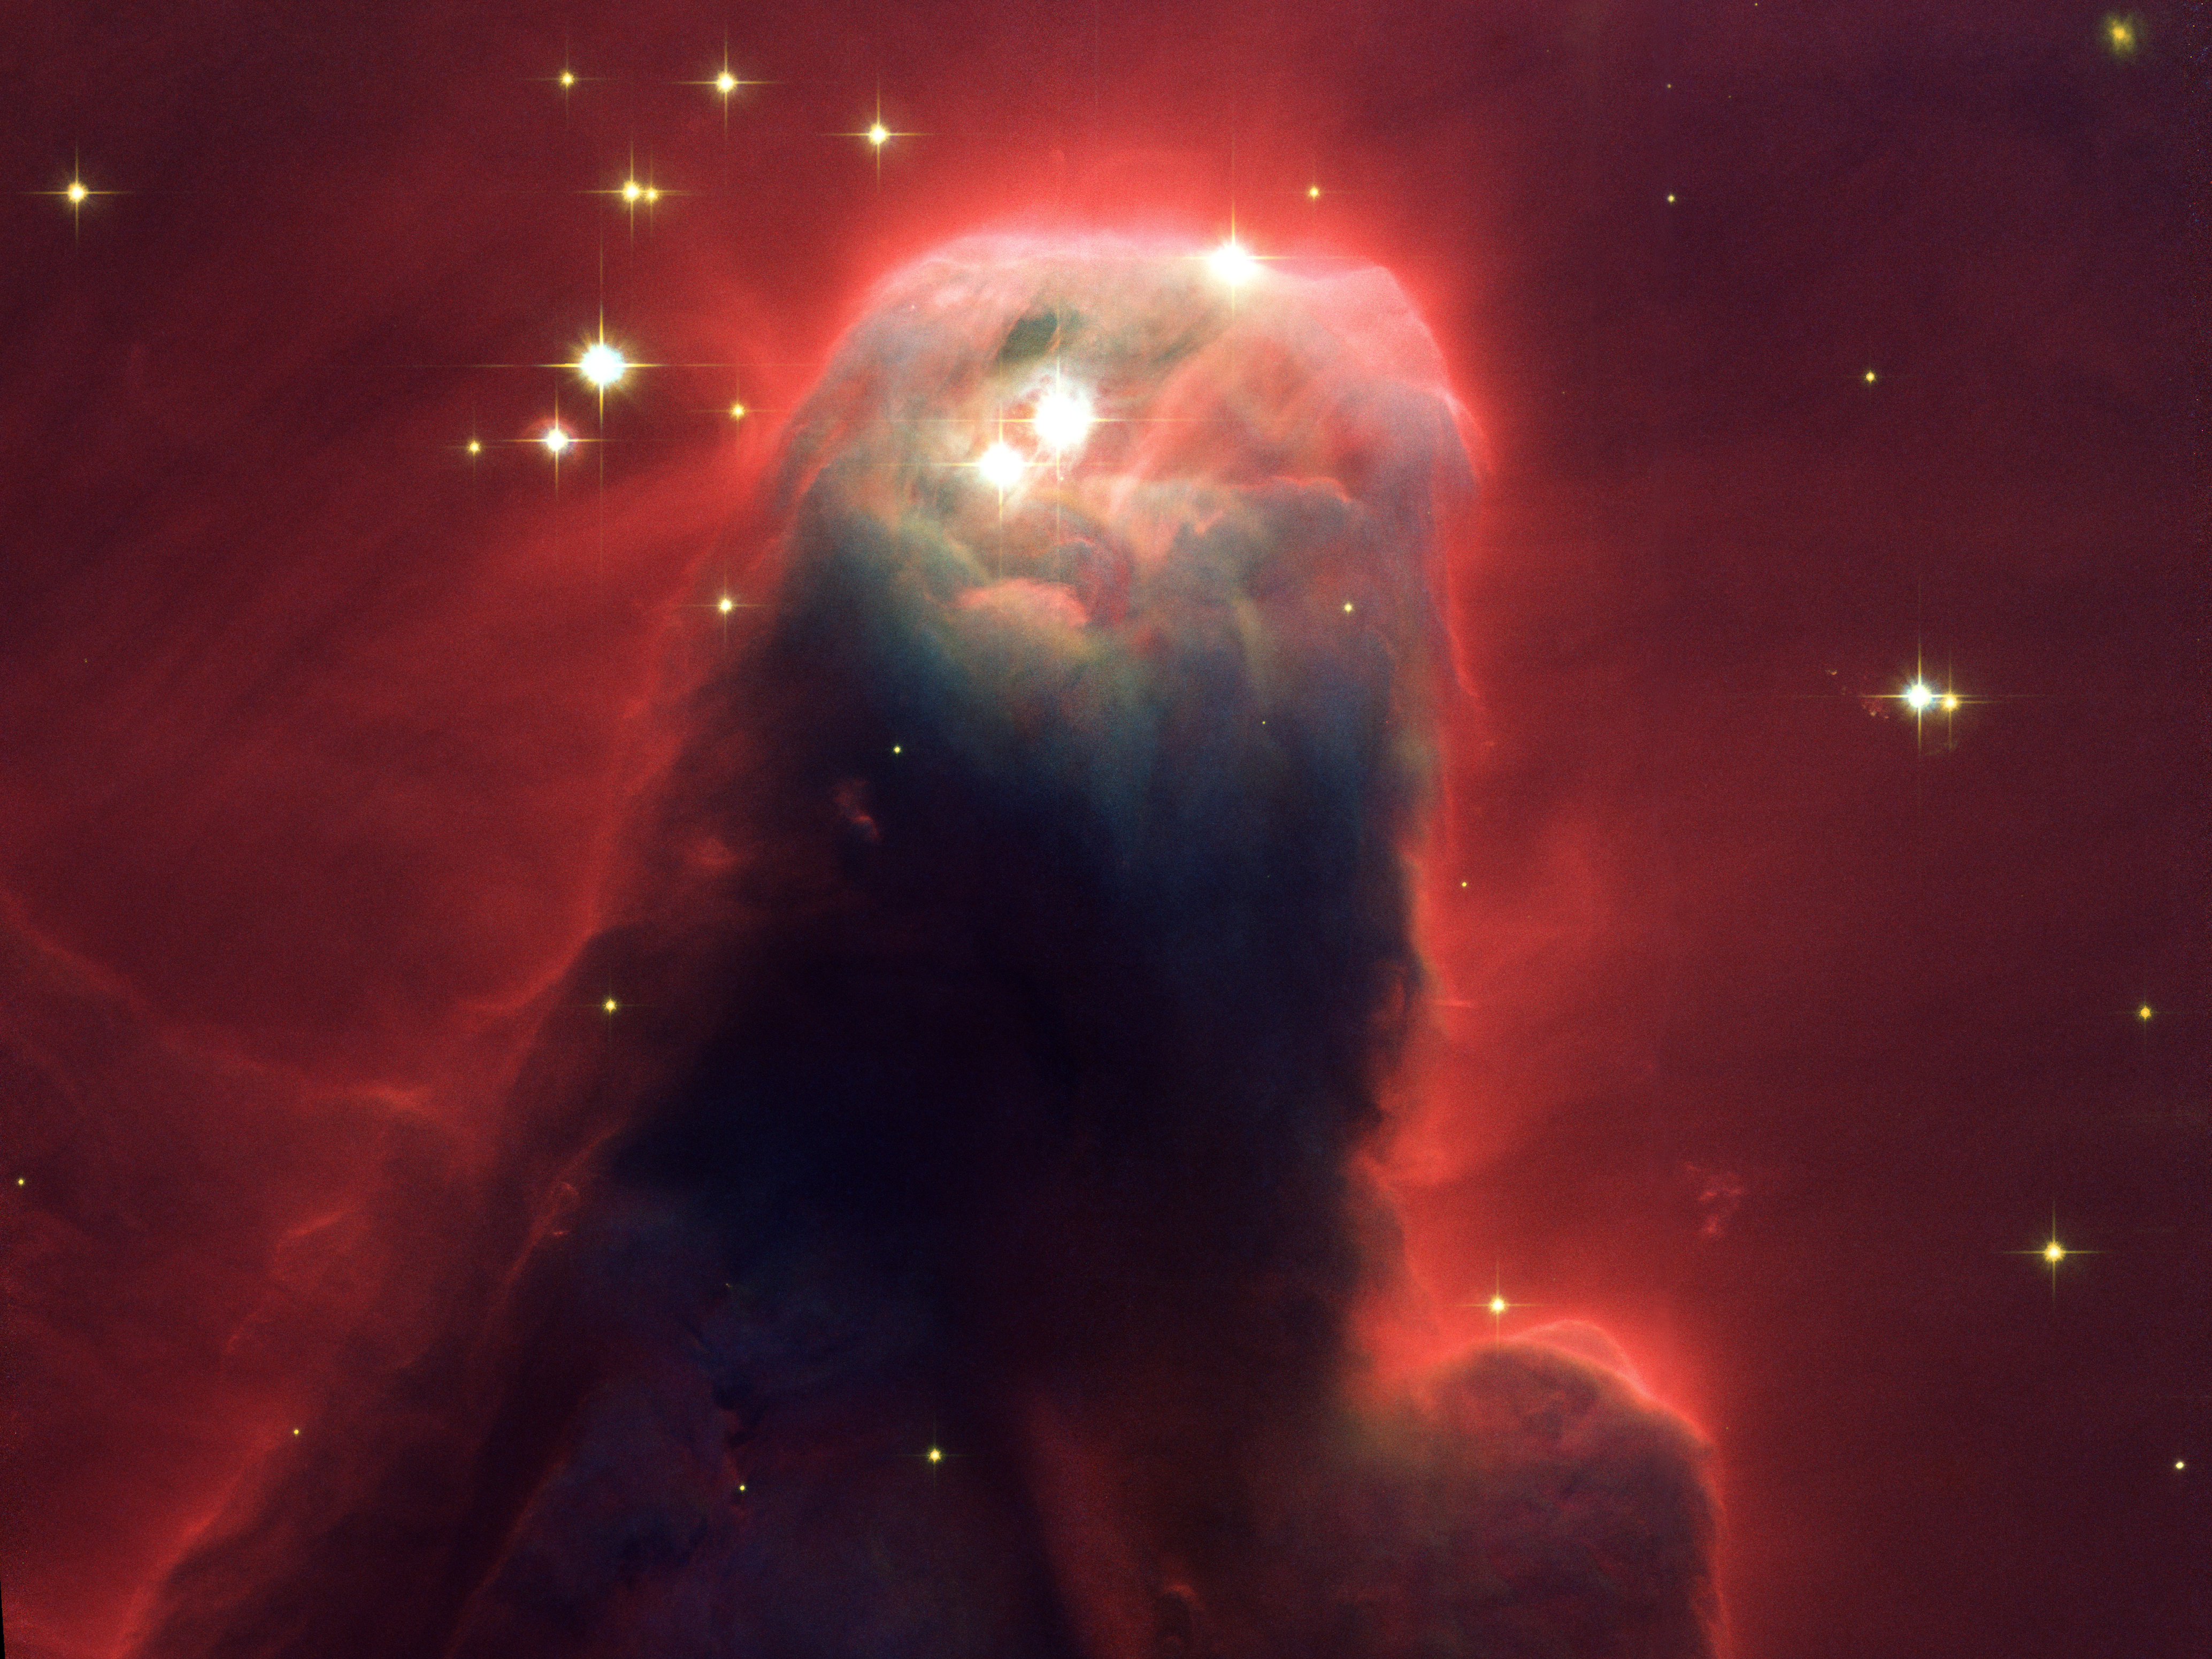

Hubble's newest camera images ghostly star-forming pillar of gas and dust

Resembling a nightmarish beast rearing its head from a crimson sea, this celestial object is actually just a pillar of gas and dust. Called the Cone Nebula (in NGC 2264) - so named because in ground-based images it has a conical shape - this monstrous pillar resides in a turbulent star-forming region. This picture, taken by the newly installed Advanced Camera for Surveys (ACS) aboard the NASA/ESA Hubble Space Telescope, shows the upper 2.5 light-years of the Cone, a height that equals 23 million roundtrips to the Moon. The entire pillar is seven light-years long.

Radiation from hot, young stars (located beyond the top of the image) has slowly eroded the nebula over millions of years. Ultraviolet light heats the edges of the dark cloud, releasing gas into the relatively empty region of surrounding space. There, additional ultraviolet radiation causes the hydrogen gas to glow, which produces the red halo of light seen around the pillar. A similar process occurs on a much smaller scale to gas surrounding a single star, forming the bow-shaped arc seen near the upper left side of the Cone. This arc, seen previously with the Hubble telescope, is 65 times larger than the diameter of our Solar System. The blue-white light from surrounding stars is reflected by dust. Background stars can be seen peeking through the evaporating tendrils of gas, while the turbulent base is pockmarked with stars reddened by dust.

Over time, only the densest regions of the Cone will be left. But inside these regions, stars and planets may form. The Cone Nebula resides 2500 light-years away in the constellation Monoceros.

The Cone is a cousin of the M16 pillars, which the Hubble telescope imaged in 1995. Consisting mainly of cold gas, the pillars in both regions resist being eroded away by the blistering ultraviolet radiation from young, massive stars. Pillars like the Cone and M16 are common in large regions of star birth. Astronomers believe that these pillars may be incubators for developing stars.

The ACS made this observation on 2 April 2002. The colour image is constructed from three separate images taken in blue, near-infrared, and hydrogen-alpha filters.

Image credit: NASA, the ACS Science Team (H. Ford, G. Illingworth, M. Clampin, G. Hartig, T. Allen, K. Anderson, F. Bartko, N. Benitez, J. Blakeslee, R. Bouwens, T. Broadhurst, R. Brown, C. Burrows, D. Campbell, E. Cheng, N. Cross, P. Feldman, M. Franx, D. Golimowski, C. Gronwall, R. Kimble, J. Krist, M. Lesser, D. Magee, A. Martel, W. J. McCann, G. Meurer, G. Miley, M. Postman, P. Rosati, M. Sirianni, W. Sparks, P. Sullivan, H. Tran, Z. Tsvetanov, R. White, and R. Woodruff) and ESA

Credit: NASA, Holland Ford (JHU), the ACS Science Team and ESA